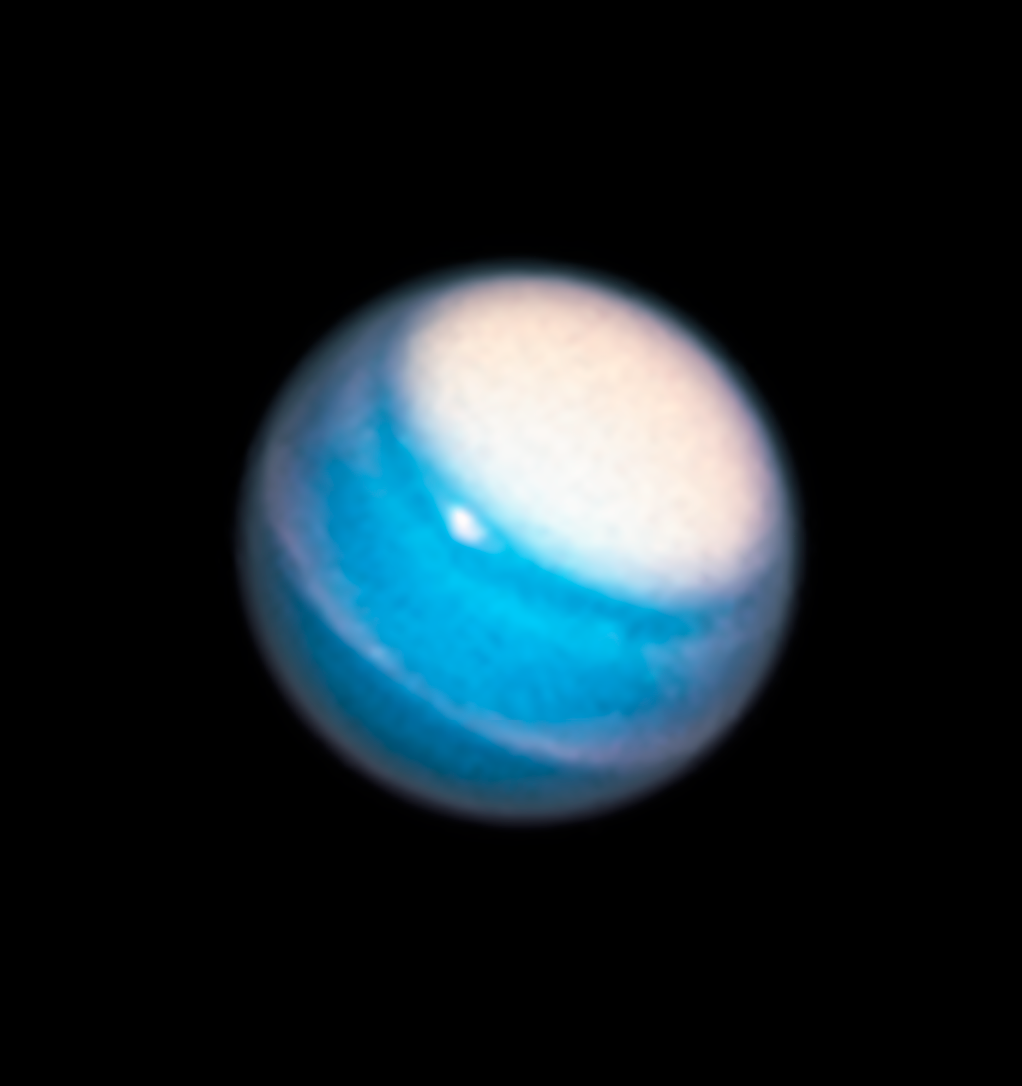

Adding to Uranus’s legacy

One of the NASA/ESA Hubble Space Telescope’s many scientific objectives is to study the planets within the Solar System — and in past years, our system’s outer planets have been observed several times as part of Hubble’s Outer Planet Atmosphere Legacy (OPAL) programme.

This programme has given us this new image of the planet Uranus, the seventh planet in the Solar System in order of increasing distance from the Sun. Past observations of Uranus using Hubble have led to many interesting insights about the cold ice giant; in 2006 the telescope managed to capture a shot in which the moon Ariel and its accompanying shadow were traversing the face of Uranus, and in 2011 Hubble was able to spot faint auroras in its atmosphere.

Observations made over the course of several years also allowed astronomers to study the planet’s faint ring system as its inclination changed with respect to Earth’s orbit. This new image, taken with Hubble’s Wide Field Camera 3, adds to the legacy of images already taken and will provide scientists with even more new insights into our distant neighbour.

Credit: NASA, ESA, A.A. Simon (NASA Goddard), and M.H. Wong and A.I. Hsu (University of California, Berkeley)